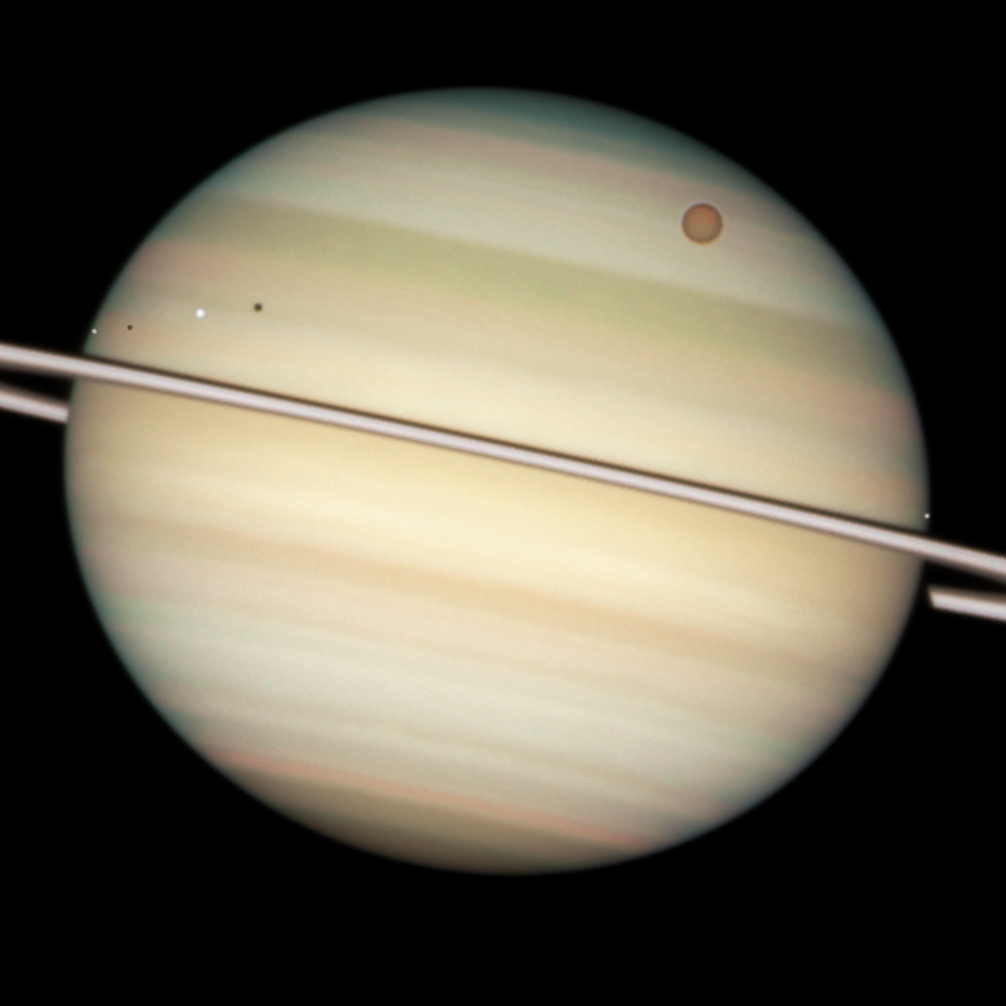

Quadruple Saturn moon transit snapped by Hubble

This close-up view of Saturn's disc captures the transit of several moons across the face of the gas giant planet. The giant orange moon Titan — larger than the planet Mercury — can be seen at upper right. The white icy moons that are much closer to Saturn, hence much closer to the ring plane in this view, are, from left to right: Enceladus, Dione, and Mimas. The dark band running across the face of the planet slightly above the rings is the shadow of the rings cast on the planet. This picture was taken with Hubble's Wide Field Planetary Camera 2 on 24 February 2009, when Saturn was at a distance of roughly 1.25 billion kilometres from Earth. Hubble can see details as small as 300 kilometres across on Saturn.

Credit: NASA, ESA and the Hubble Heritage Team (STScI/AURA). Acknowledgment: M. Wong (STScI/UC Berkeley) and C. Go (Philippines)